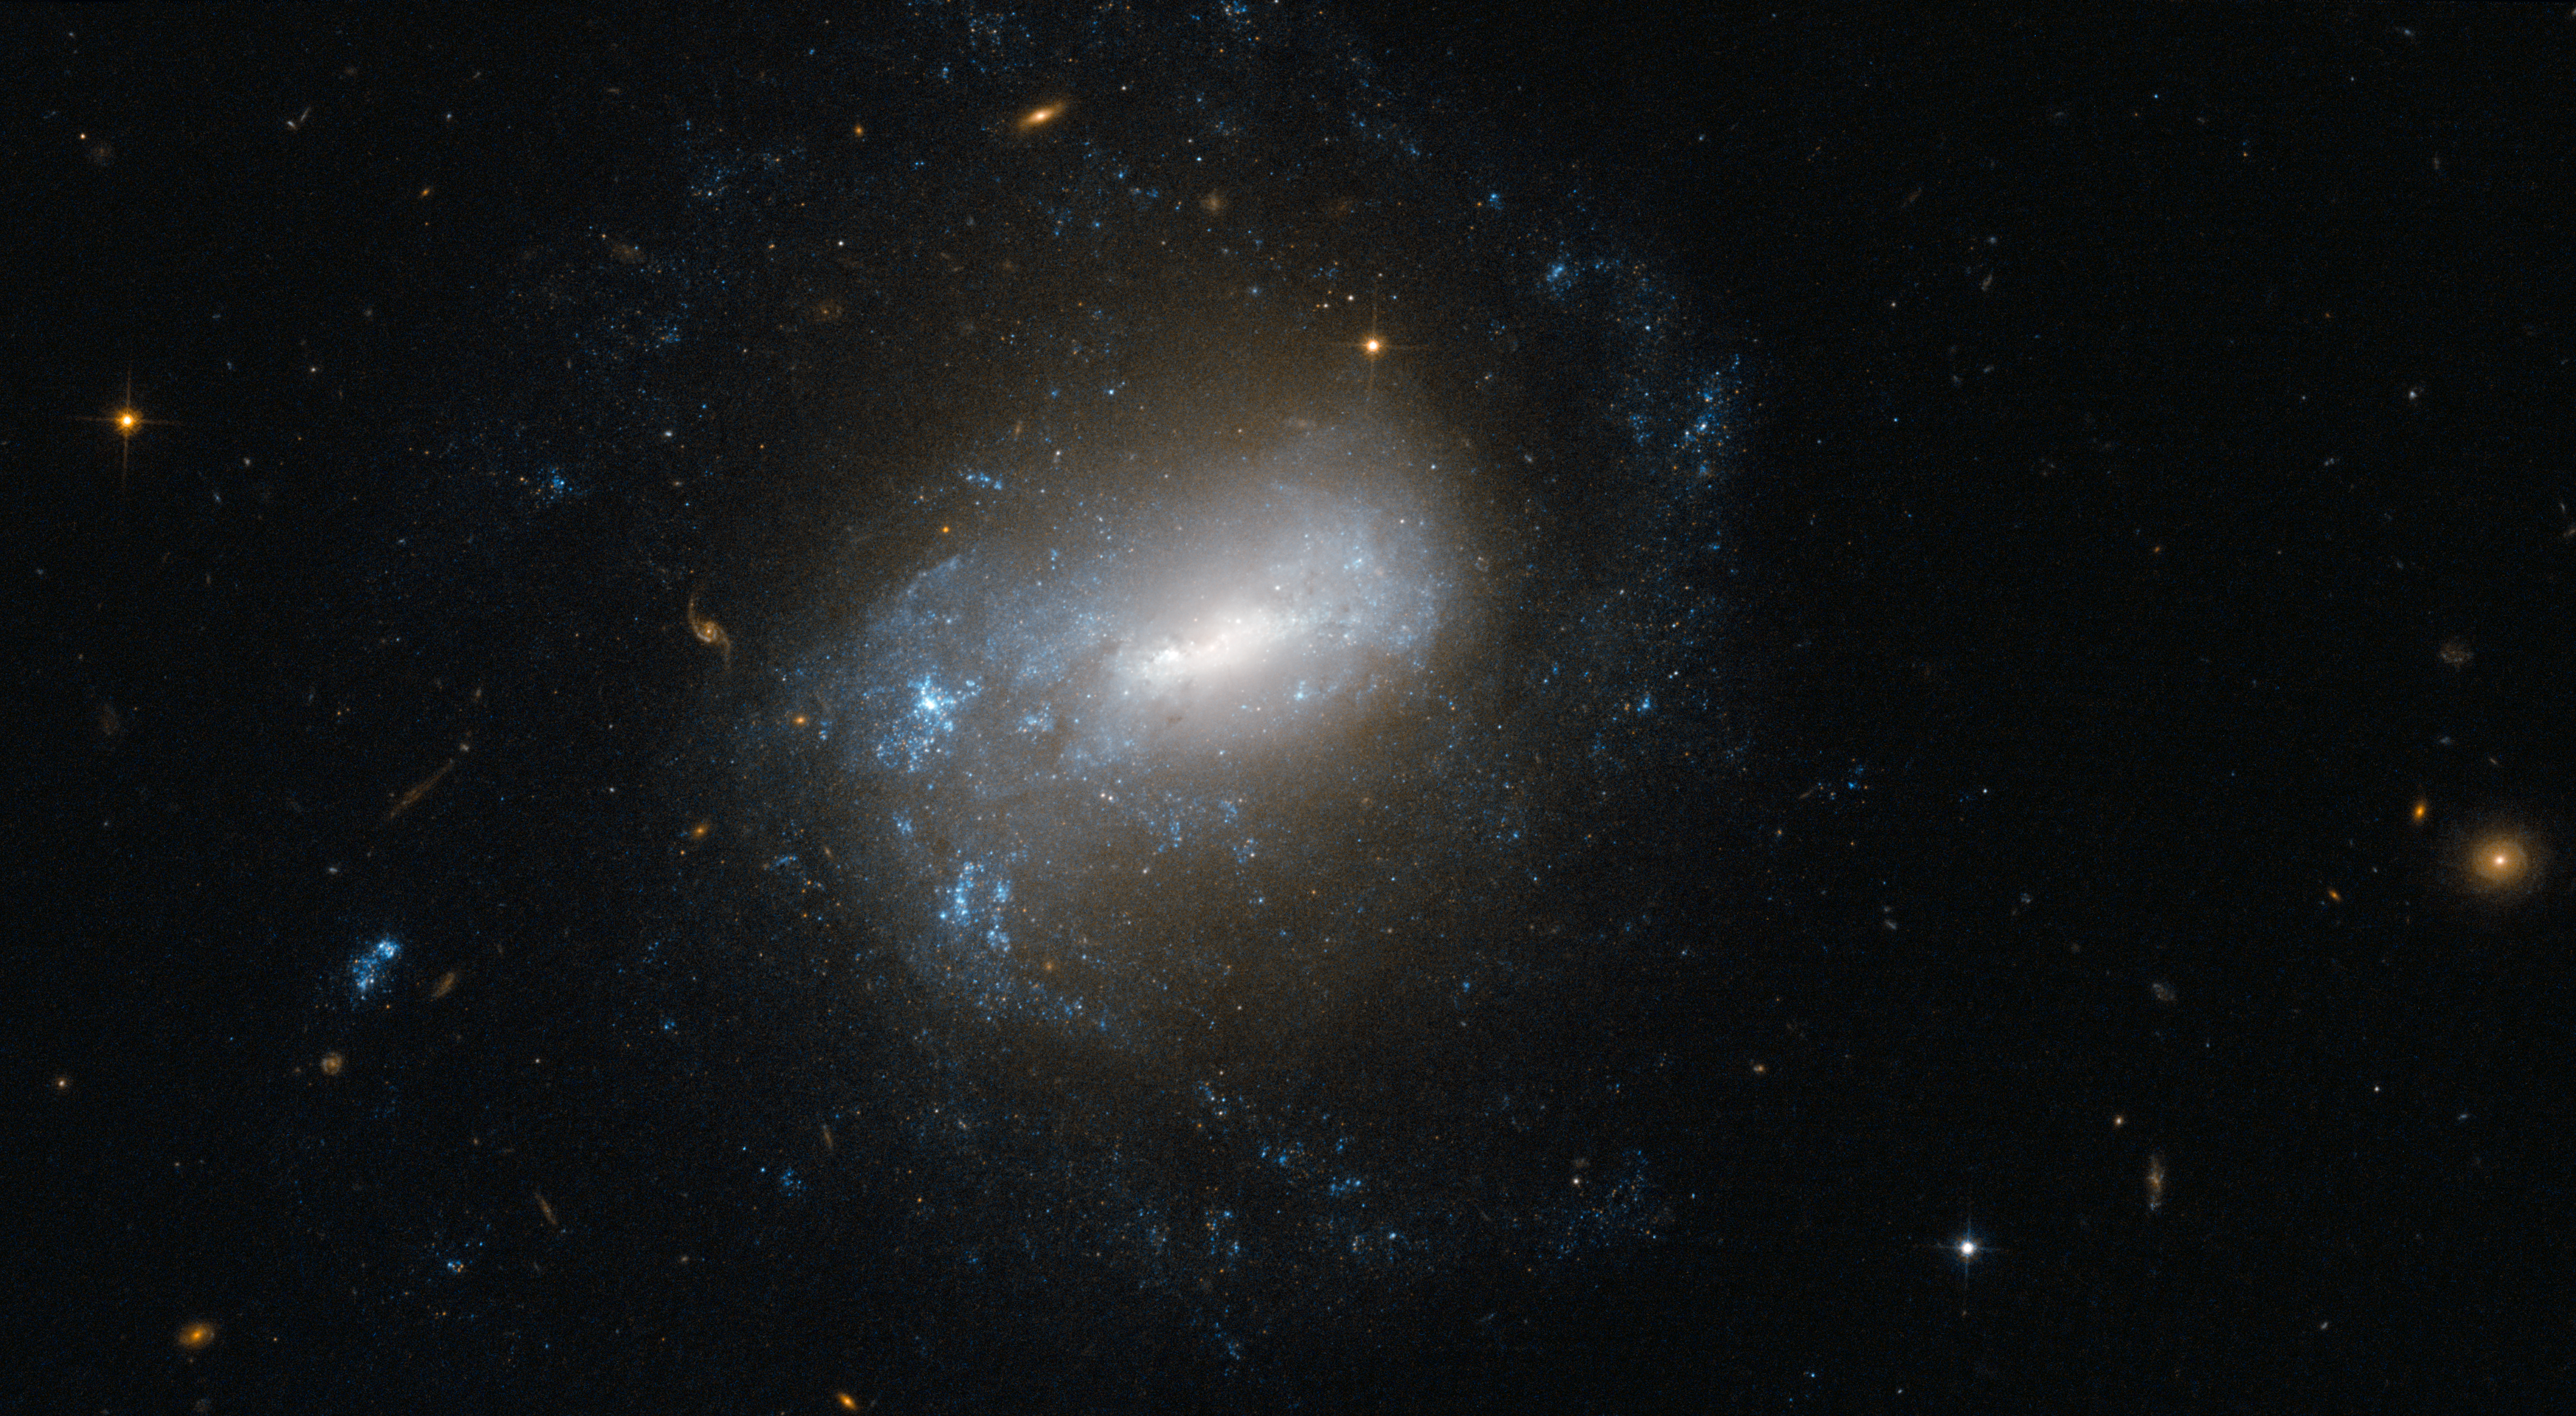

Islands of stars in the river

The spiral galaxy NGC 1345 and its loose and ragged arms dominate this rich image from the NASA/ESA Hubble Space Telescope. It is a member of the Eridanus Galaxy Cluster — a group of about 70 galaxies that lies 85 million light-years away in the constellation of Eridanus (the River). This region of the night sky is well populated with bright galaxies, with the Fornax Cluster of galaxies also nearby on the celestial sphere, although the two clusters are actually separated by about 20 million light-years. Collectively, they are known as the Fornax Supercluster or the Southern Supercluster.

John Herschel discovered NGC 1345 in 1835 from South Africa. He described it as small and very faint and it is still far from easy to see it even with quite a large amateur telescope, where it appears as a small, circular fuzz.

Apart from the main galaxy that dominates the picture, lots more distant galaxies of many shapes and sizes can be seen in this image, some shining right through the foreground galaxy. NGC 1345 itself features an elongated bar extending from the nucleus and spiral arms that emanate outwards, making it a barred spiral type. Classifying galaxy shapes is an important part of astronomical research as it tells us much about how the Universe has evolved. But computers aren’t really ideal for the task; people are much better at recognising shapes, which is why a citizen-science project called Galaxy Zoo: Hubble is asking members of the public to help sift through the vast archive of images and classify galaxies by type. If you would like to join the cause, there’s a link to the project below.

This picture was created from images taken with the Wide Field Channel of Hubble’s Advanced Camera for Surveys. Images taken through a blue filter (F435W) were coloured blue and images through a near-infrared filter (F814W) were coloured red. The exposure times were 17.5 minutes per filter in total and the field of view is 3.2 by 1.6 arcminutes.

Credit: ESA/Hubble & NASA